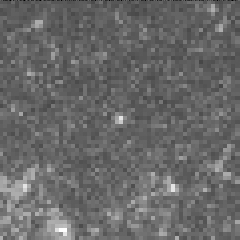

Cepheid variable star in galaxy M100

The interval it takes for the Cepheid to complete one pulsation is a direct indication of the stars's intrinsic brightness. This value can be used to make a precise measurement of the galaxy's distance, which turns out to be 56 million light-years from Earth. This image was taken on April 23, 1994.

Credit: Dr. Wendy L. Freedman, Observatories of the Carnegie Institution of Washington, and NASA/ESA